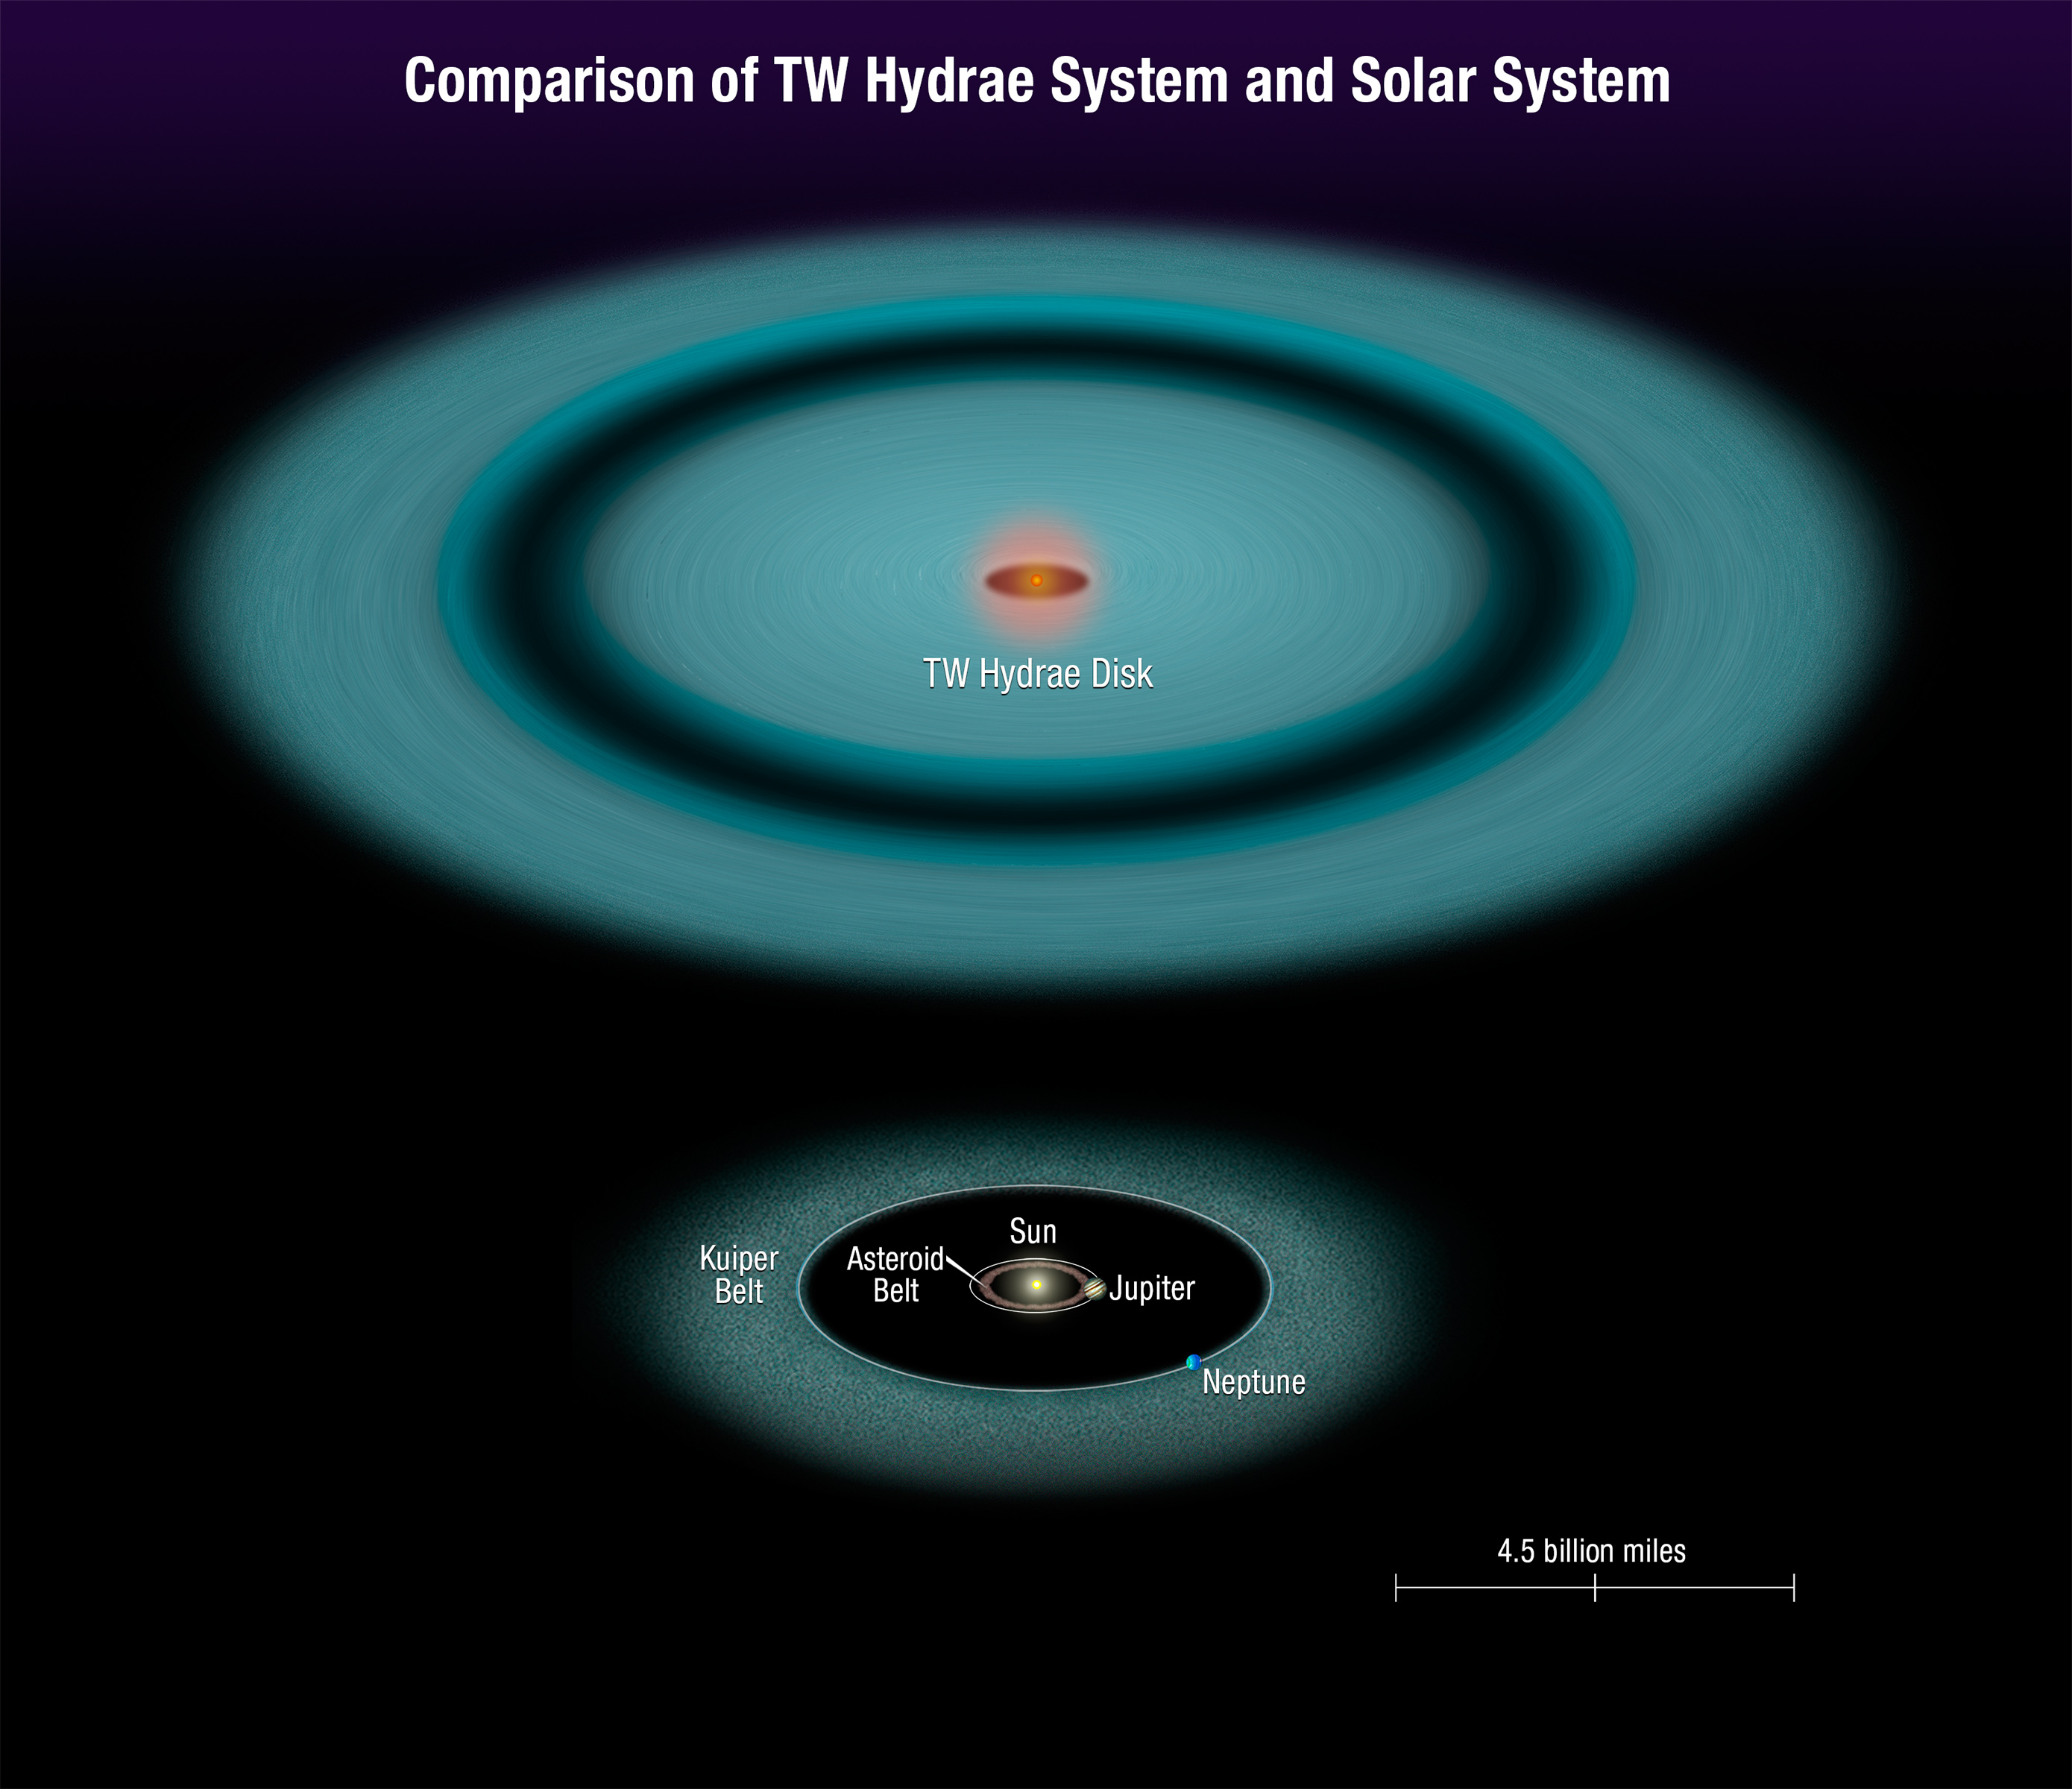

Comparison of TW Hydrae system to our Solar System

This illustration shows the protoplanetary disc around red dwarf star TW Hydrae. This disc is much wider than the size of our Solar System. In fact, the gap in the TW Hydrae disc produced by a suspected planet resides 12 billion kilometres away from the star. At this distance, the putative planet would orbit far beyond our Kuiper Belt, a reservoir of icy material left over from the formation of our Solar System.

Credit: NASA, ESA, and A. Feild (STScI)